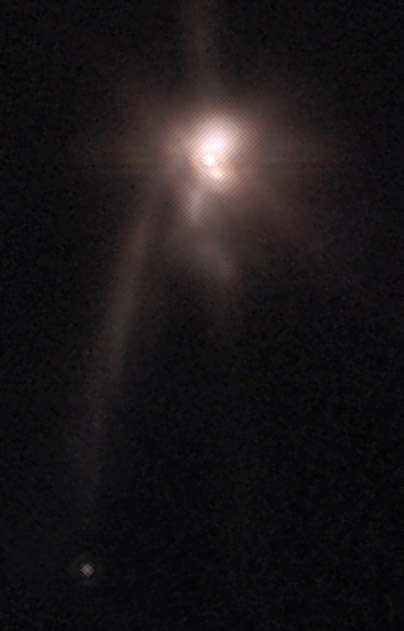

The mysterious object TMR-1C and its protobinaries

Originally suspected to be the first directly detected planet outside our Solar System follow up observations have shown that the object is most likely a background star whose light is has been dimmed and reddened by interstellar dust. Even newer observations have now brought the phantom planet back from oblivion.

It seems that TMR-1C is a protoplanet, located about 1 000 AU from its host stars, which are in the center of this NASA/ESA Hubble Space Telescope picture. However the true nature of TMR-1C is still unclear and needs further investigation.

Credit: S. Terebey (Extrasolar Research Corp.) and NASA/ESA